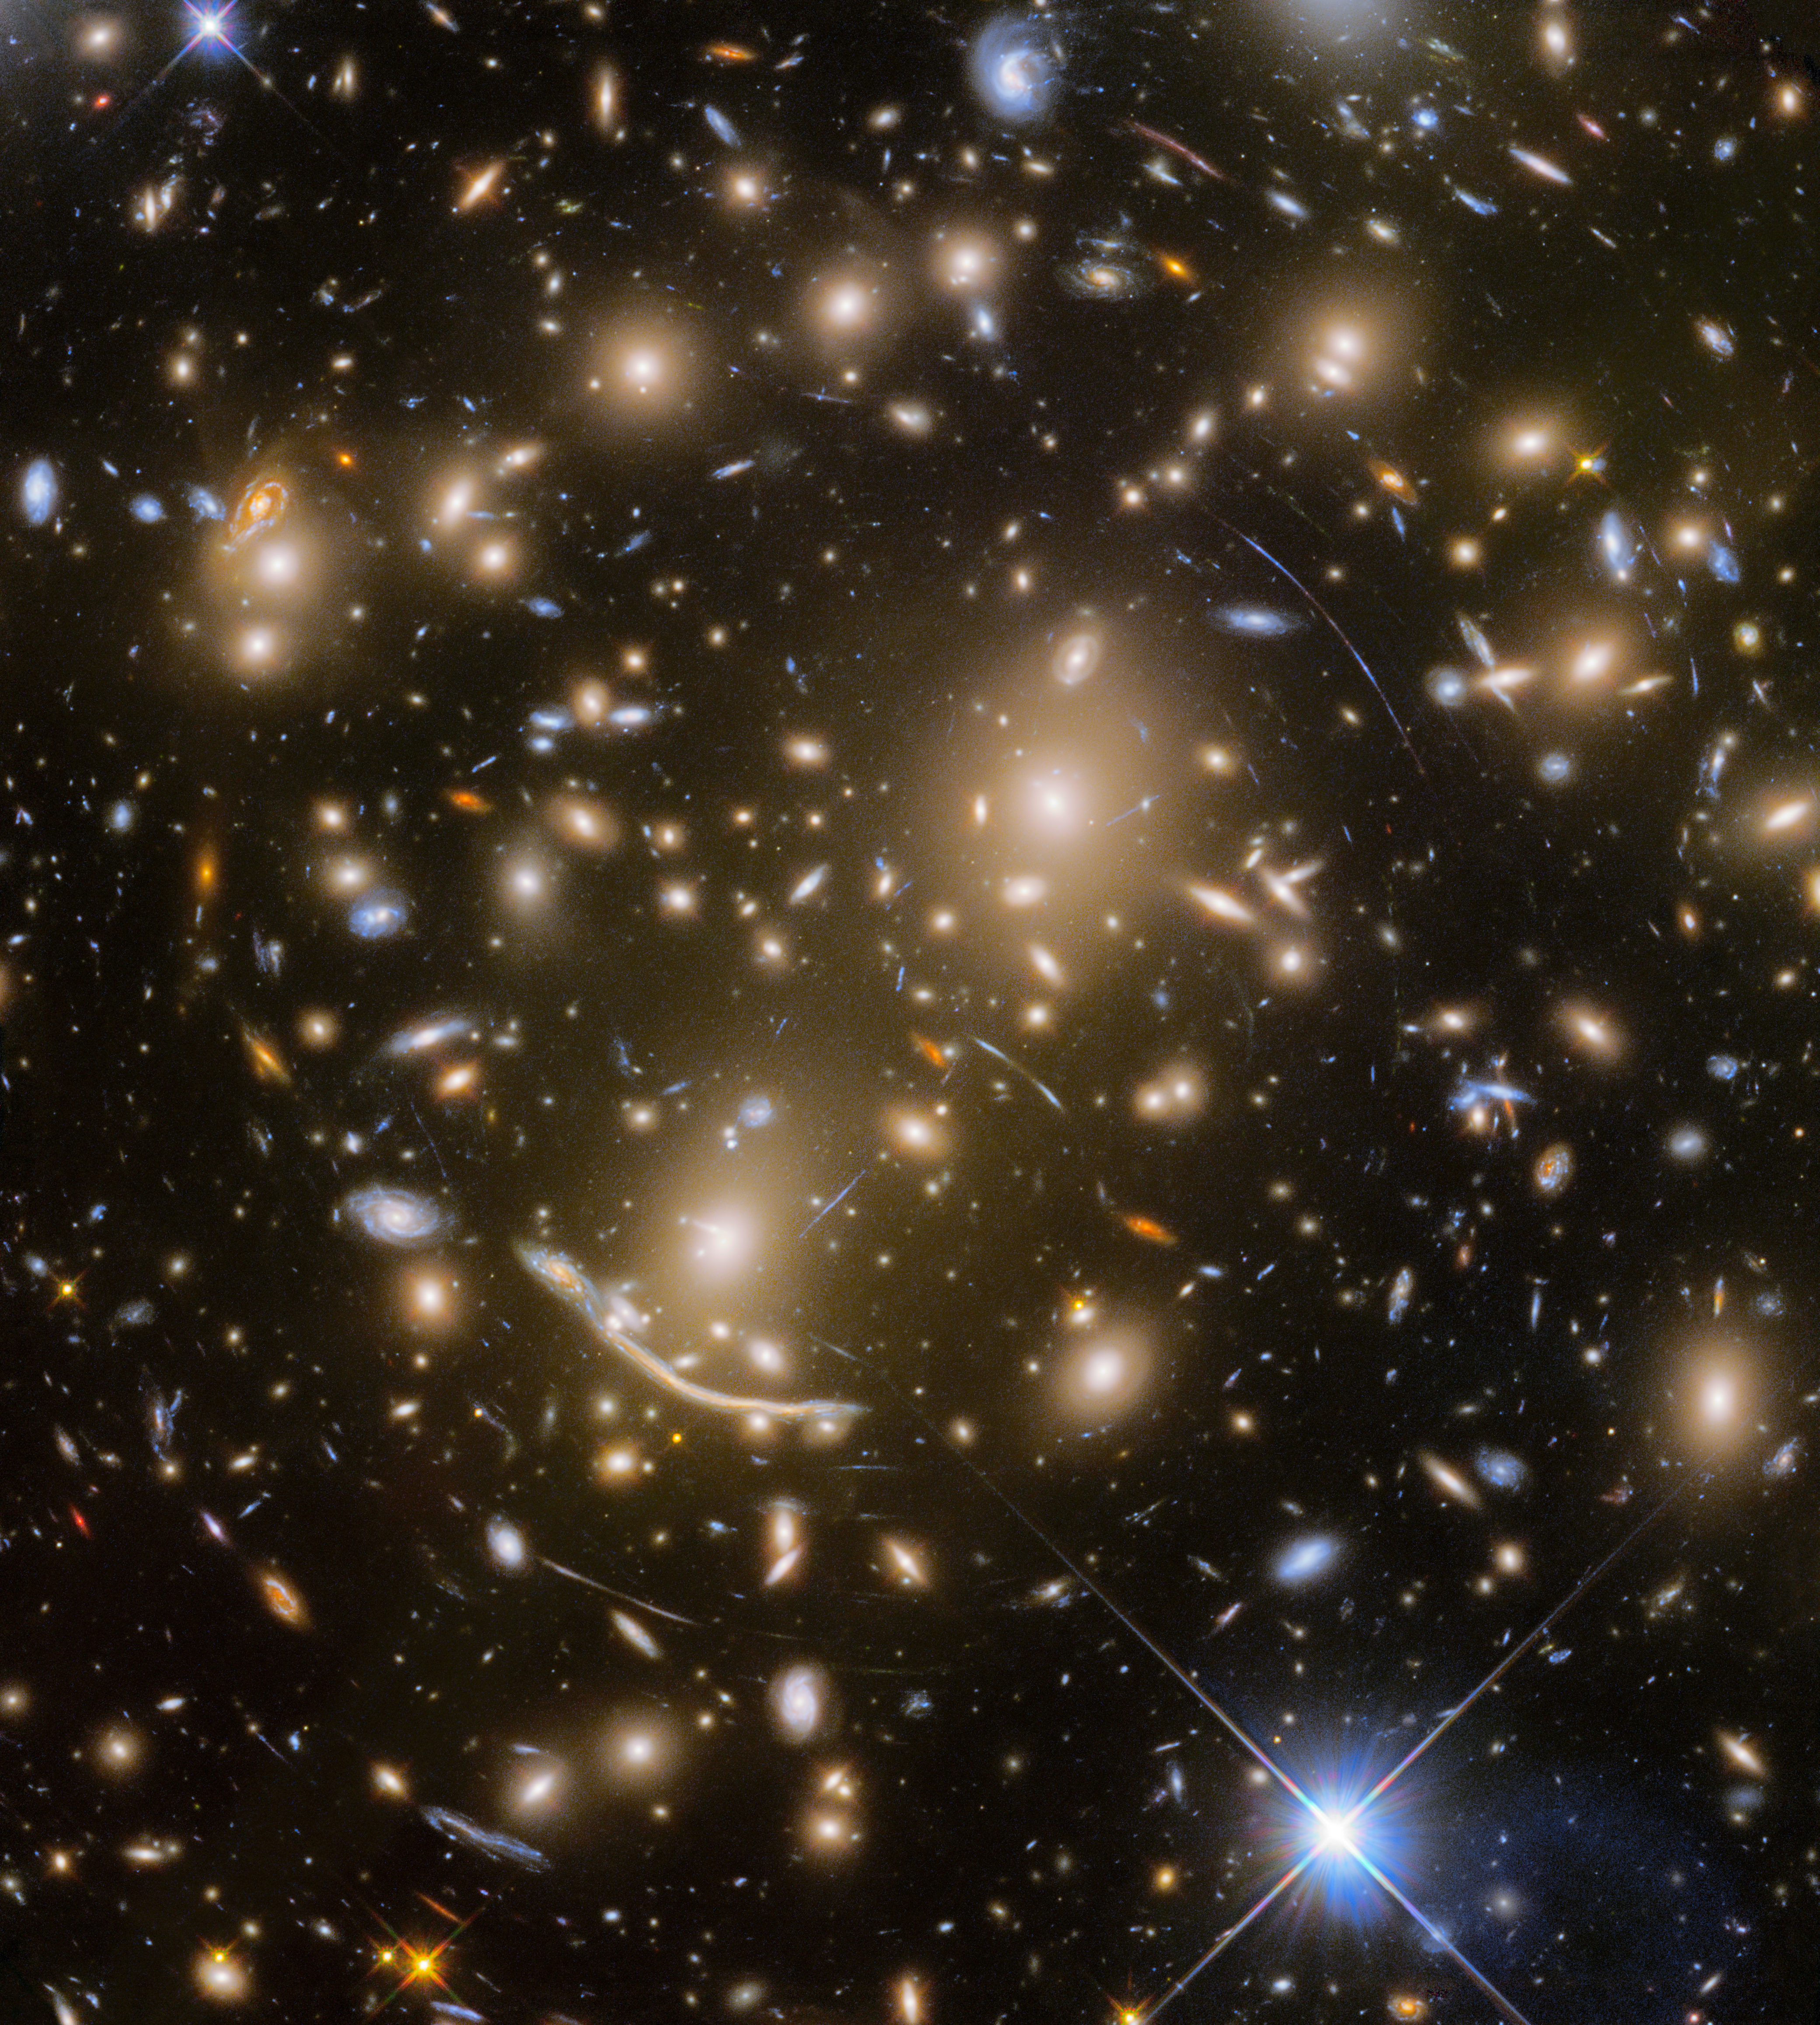

The last of the Frontier Fields — Abell 370

With the final observation of the distant galaxy cluster Abell 370 — some five billion light-years away — the Frontier Fields program came to an end.

Abell 370 is one of the very first galaxy clusters in which astronomers observed the phenomenon of gravitational lensing, the warping of spacetime by the cluster’s gravitational field that distorts the light from galaxies lying far behind it. This manifests as arcs and streaks in the picture, which are the stretched images of background galaxies.

Credit: NASA, ESA/Hubble, HST Frontier Fields